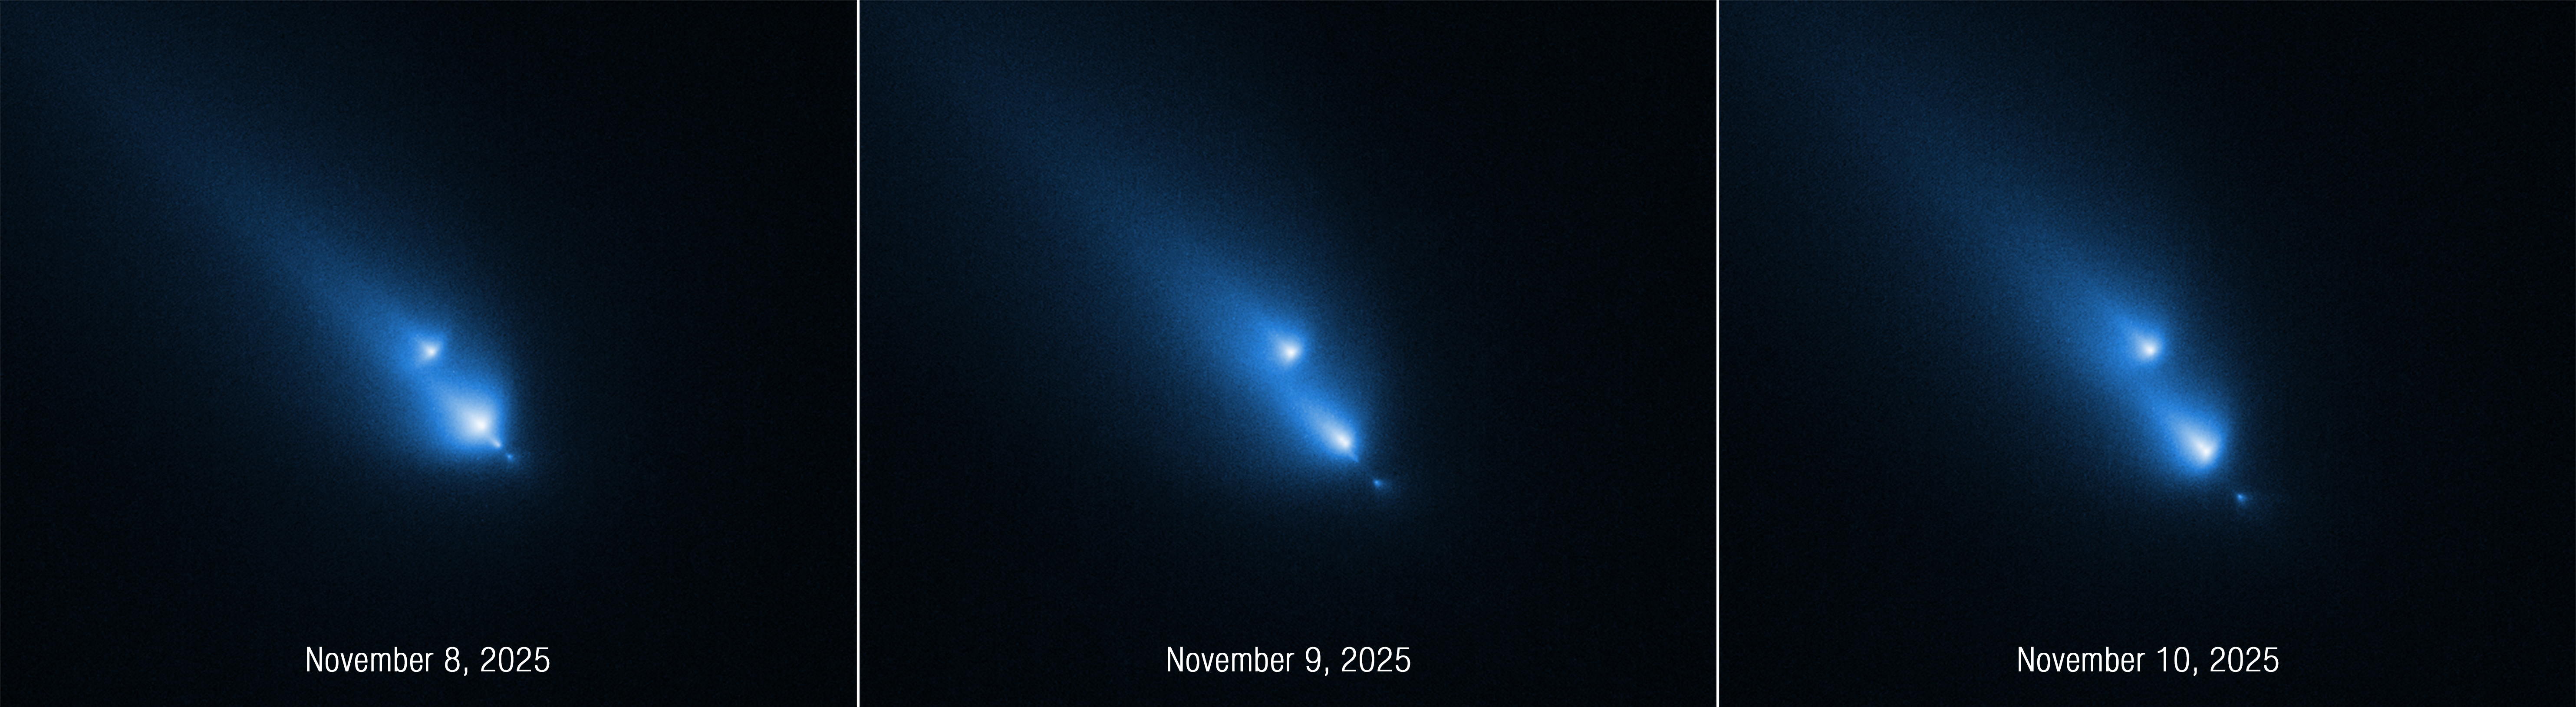

Comet C/2025 K1 (ATLAS): November 2025

This series of Hubble Space Telescope images of the fragmenting comet C/2025 K1 (ATLAS), or K1 for short, was taken over the course of three consecutive days: November 8, 9, and 10, 2025. Captured by Hubble’s STIS (Space Telescope Imaging Spectrograph) instrument, the sequence shows the progressive disintegration of the comet over this brief period. This is the first time Hubble has witnessed a comet so early in the process of breaking up.

Hubble caught K1 fragmenting into at least four pieces, each with a distinct coma, the fuzzy envelope of gas and dust that surrounds a comet’s icy nucleus. Hubble cleanly resolved the fragments, but from the ground they only appeared as barely distinguishable blobs.

Credit: NASA, ESA, D. Bodewits (Auburn). Image processing: J. DePasquale (STScI)